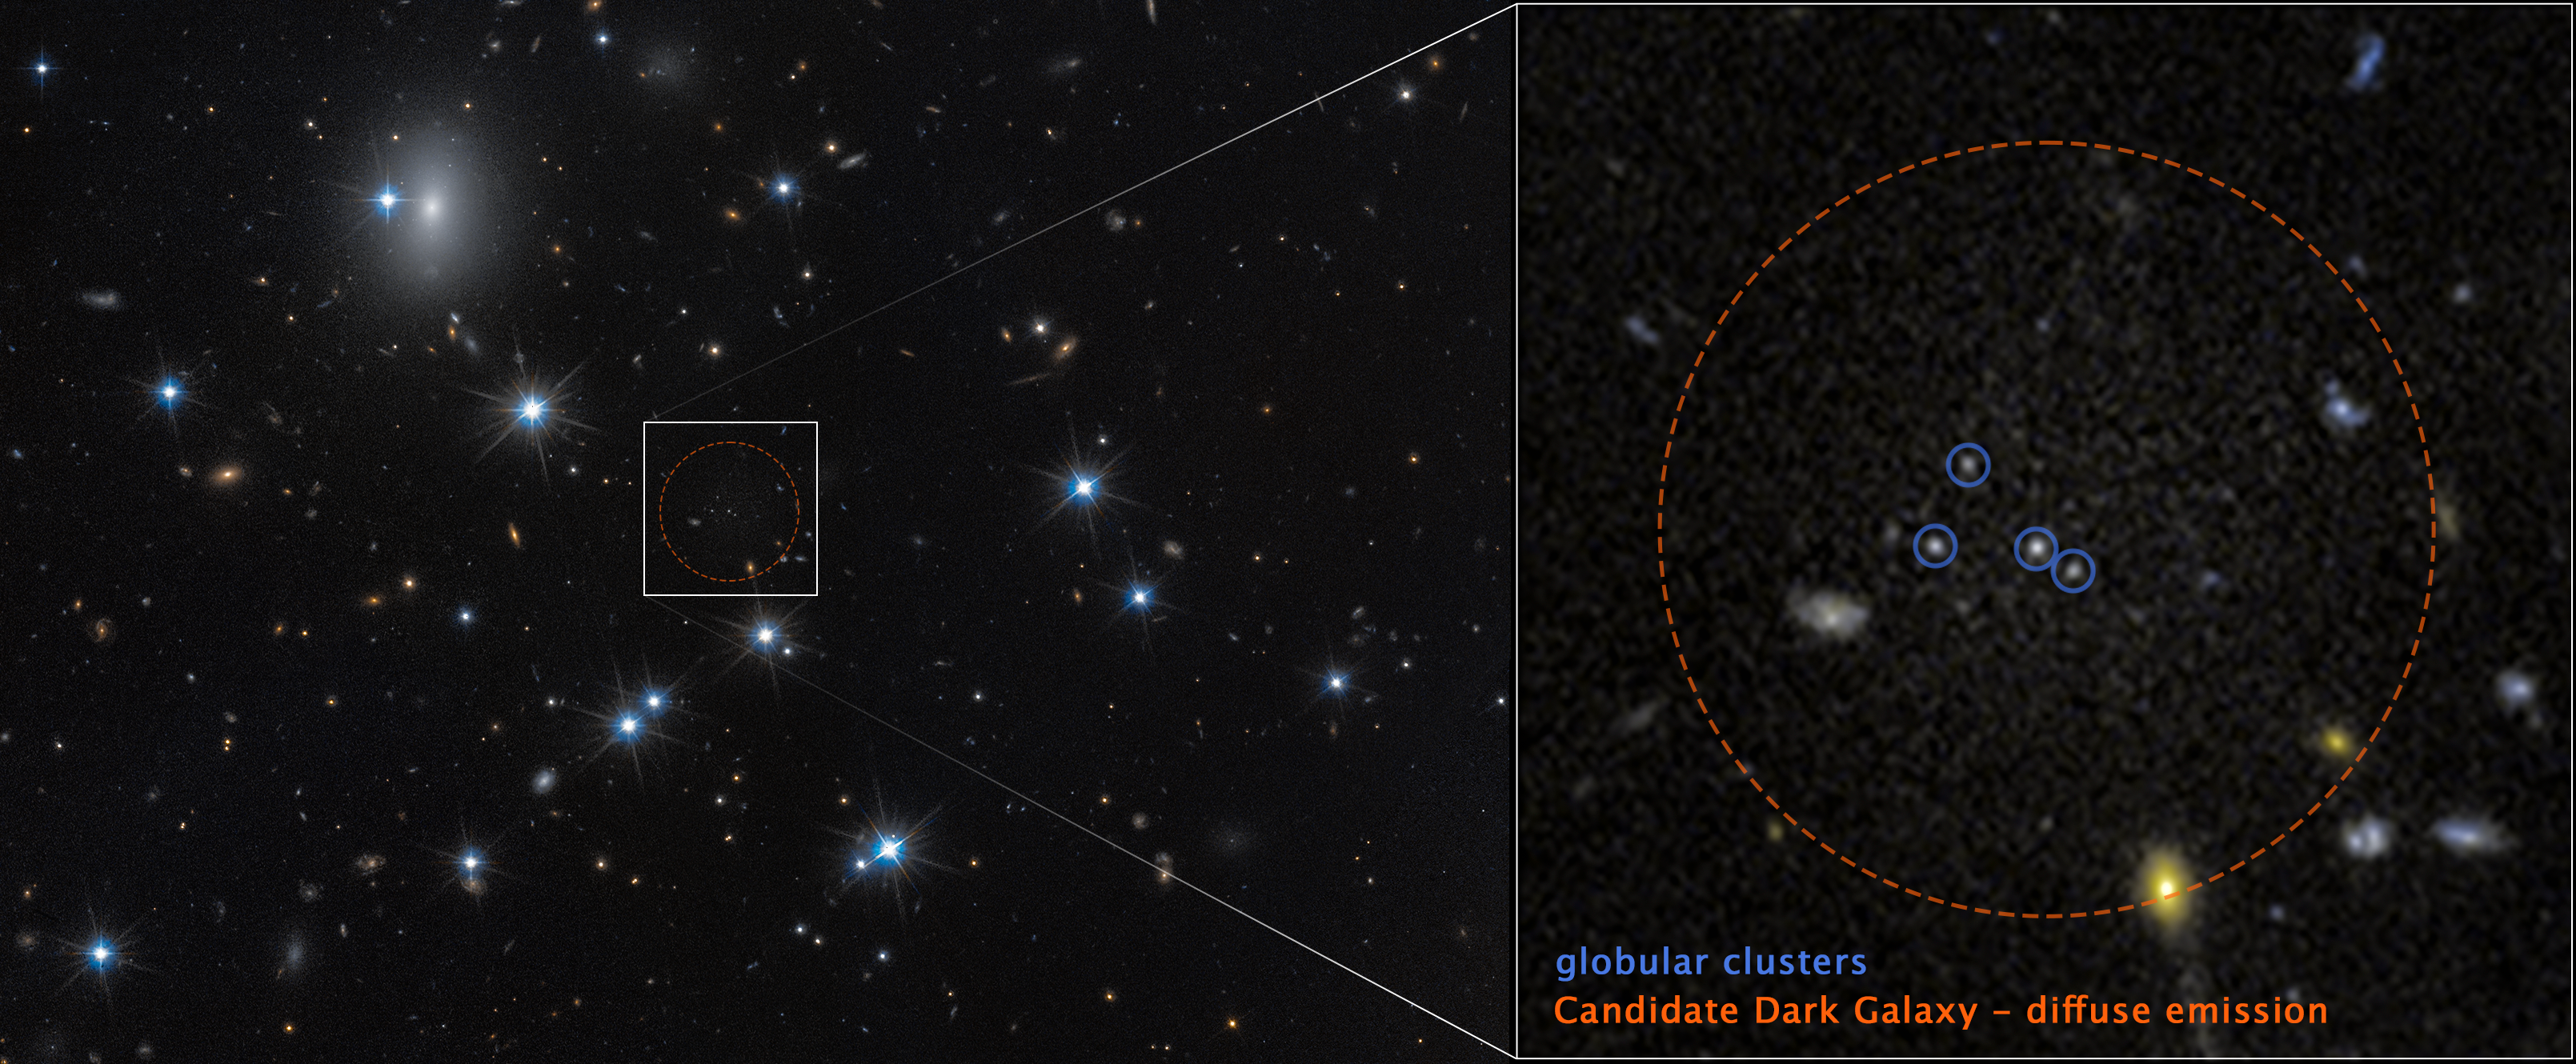

Dark galaxy CDG-2 near Perseus Cluster (annotated)

The low-surface-brightness galaxy CDG-2, shown in this image from the NASA/ESA Hubble Space Telescope, is dominated by dark matter and contains only a sparse scattering of stars. This galaxy is nearly invisible, but by using advanced statistical techniques, scientists identified it by searching for tight groupings of stars called globular clusters. At left, the white box marks the area that was examined. At right is a magnified view of that area. The circle marked with a dashed red boundary indicates the location of the dark-matter dominated galaxy. Within the dashed circle are four globular clusters outlined by small, blue circles. Several background galaxies also appear within the red circle, but these are not related to the galaxy CDG-2.

The Hubble observations include those from programme 15235 (W. Harris).

Credit: NASA, ESA, D. Li (Utoronto), Image Processing: J. DePasquale (STScI)